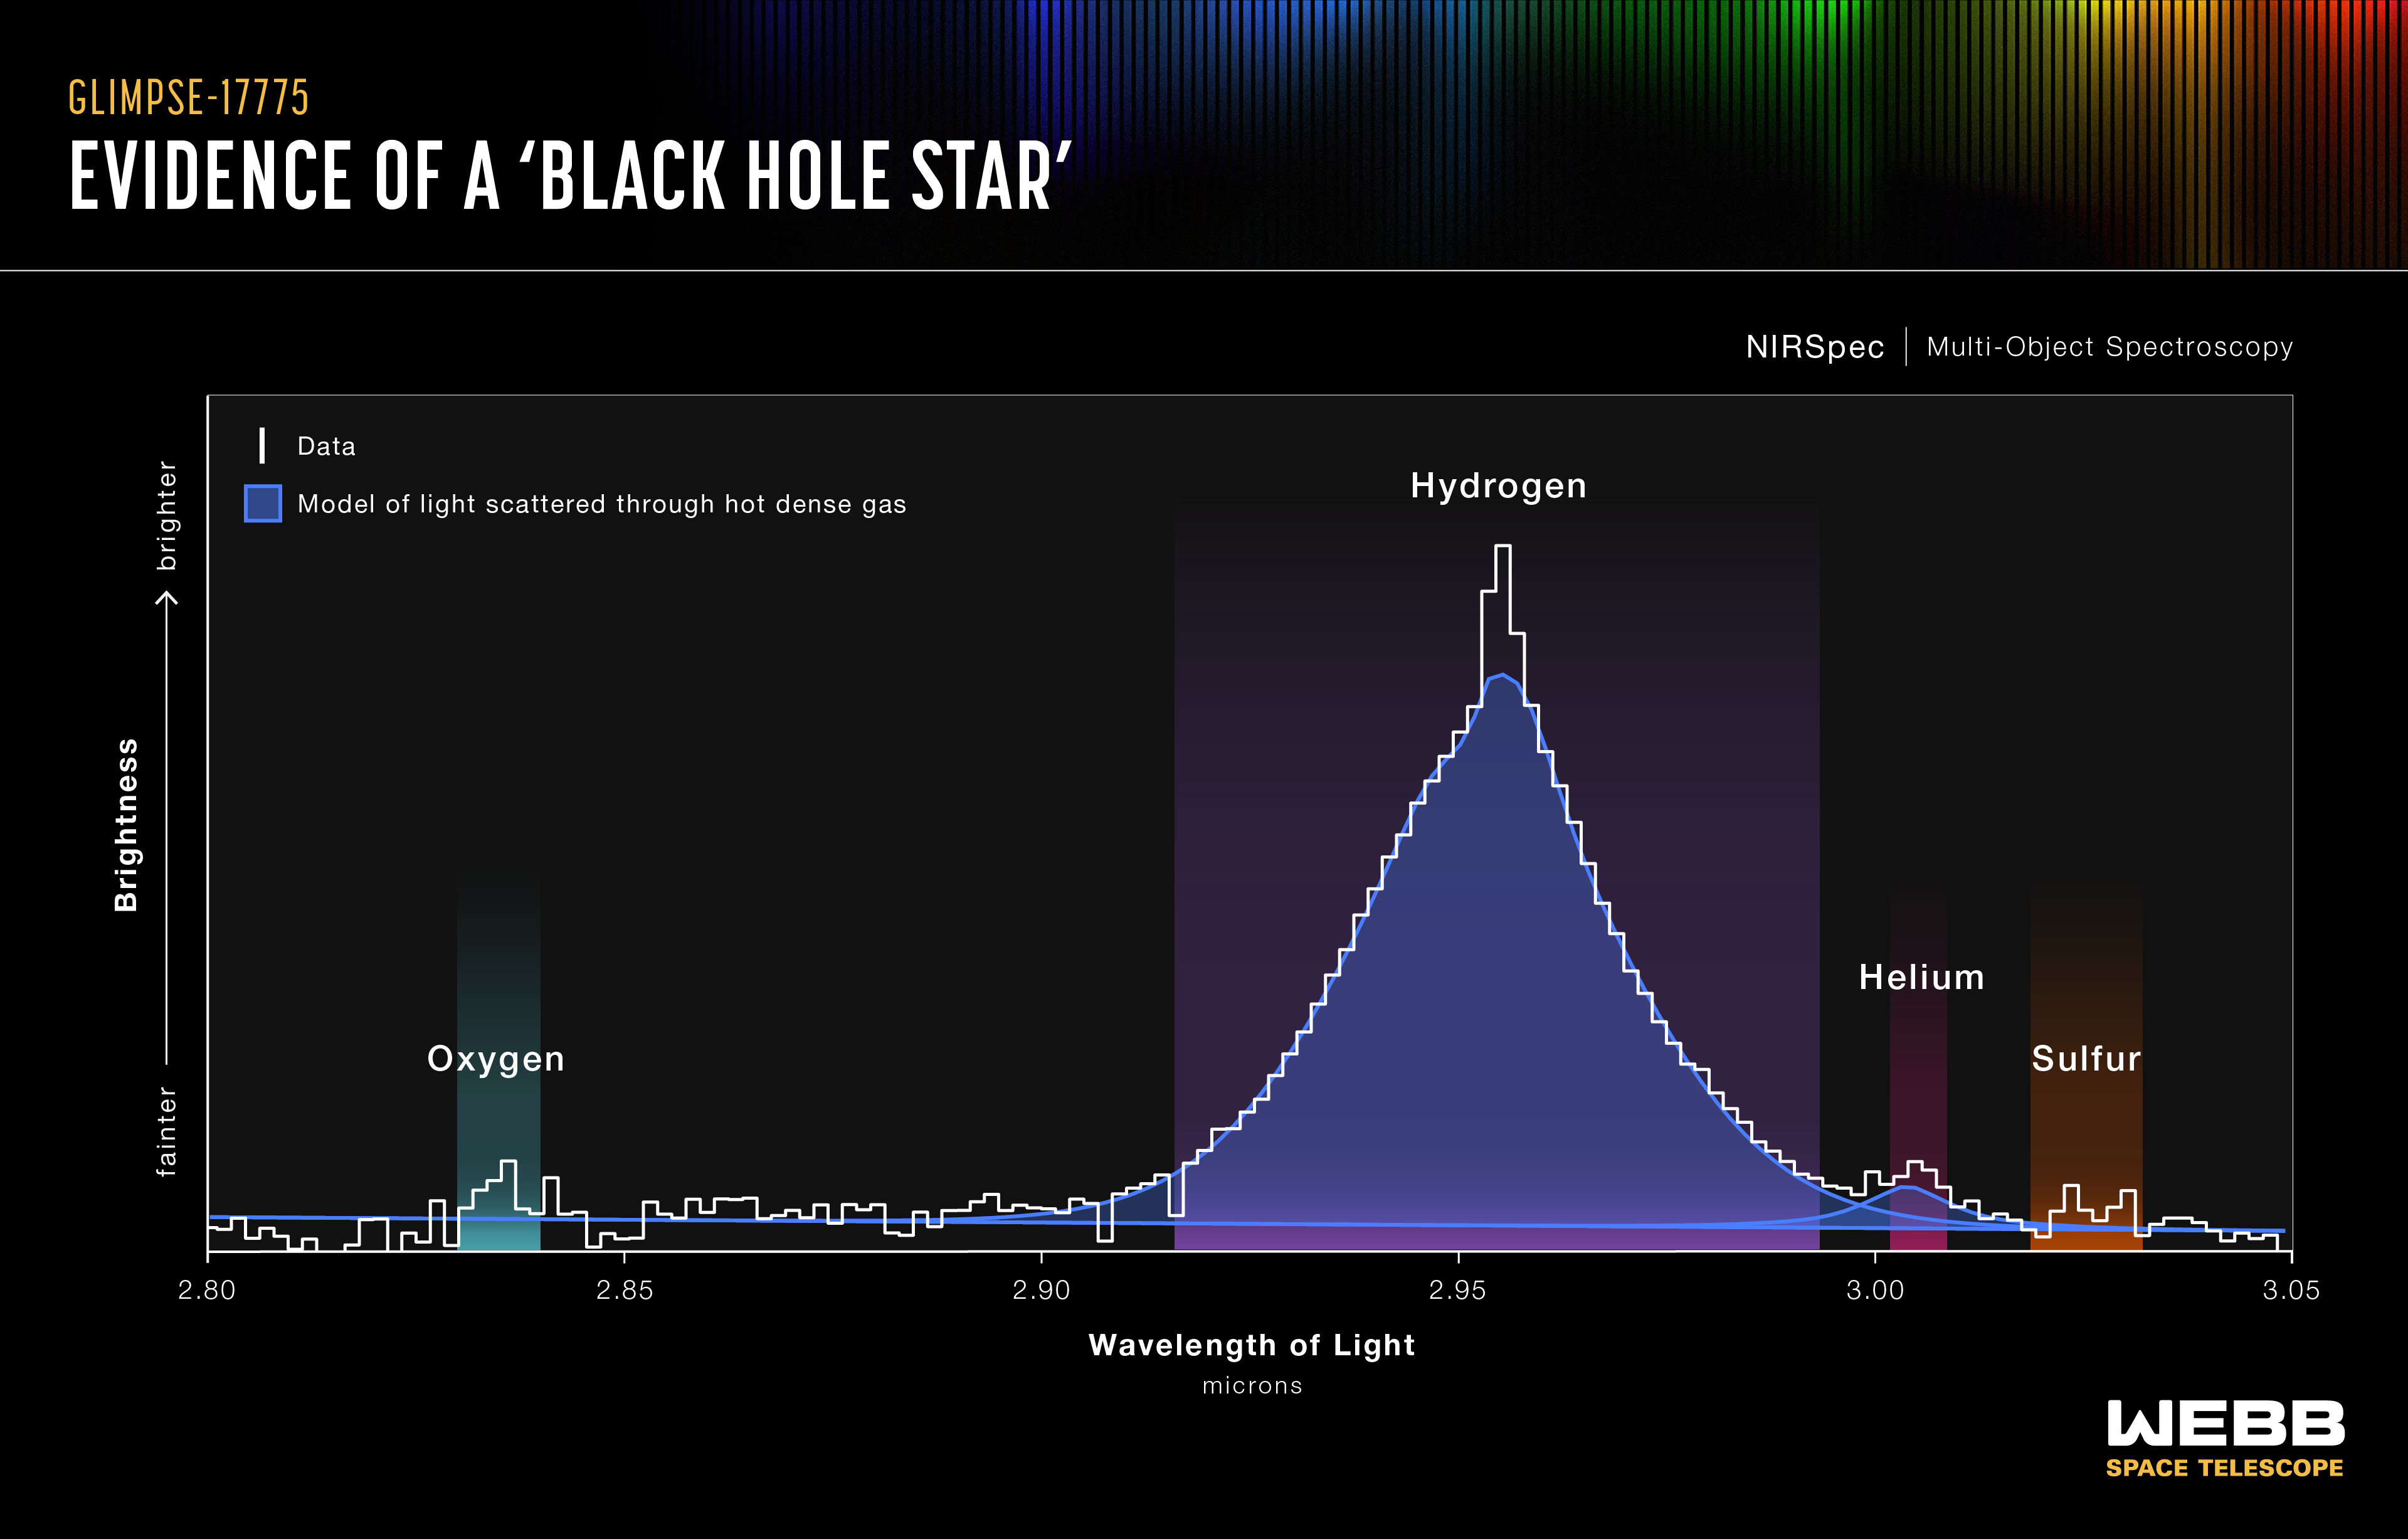

GLIMPSE-17775 spectrum

The NASA/ESA/CSA James Webb Space Telescope’s spectroscopic data on little red dot GLIMPSE-17775 contains more than 40 spectral lines. The spectrum contains multiple independent indicators that support the theory that this little red dot is a black hole star: a rapidly accreting, or growing, black hole enveloped in a hot, dense gas cocoon. This layered, shell-like environment is reprocessing the light emitted from near the black hole and producing the features seen in the spectrum.

For example, scientists found that many of the spectral lines, such as hydrogen, oxygen, and helium, do not match a simple, rotating gas cloud model. The best fit model includes a broadening effect known as electron scattering, a telltale sign that a dense, layered gas cocoon is enshrouding the source.

Credit: NASA, ESA, CSA, V. Kokorev (University of Texas at Austin), A. Pagan (STScI)